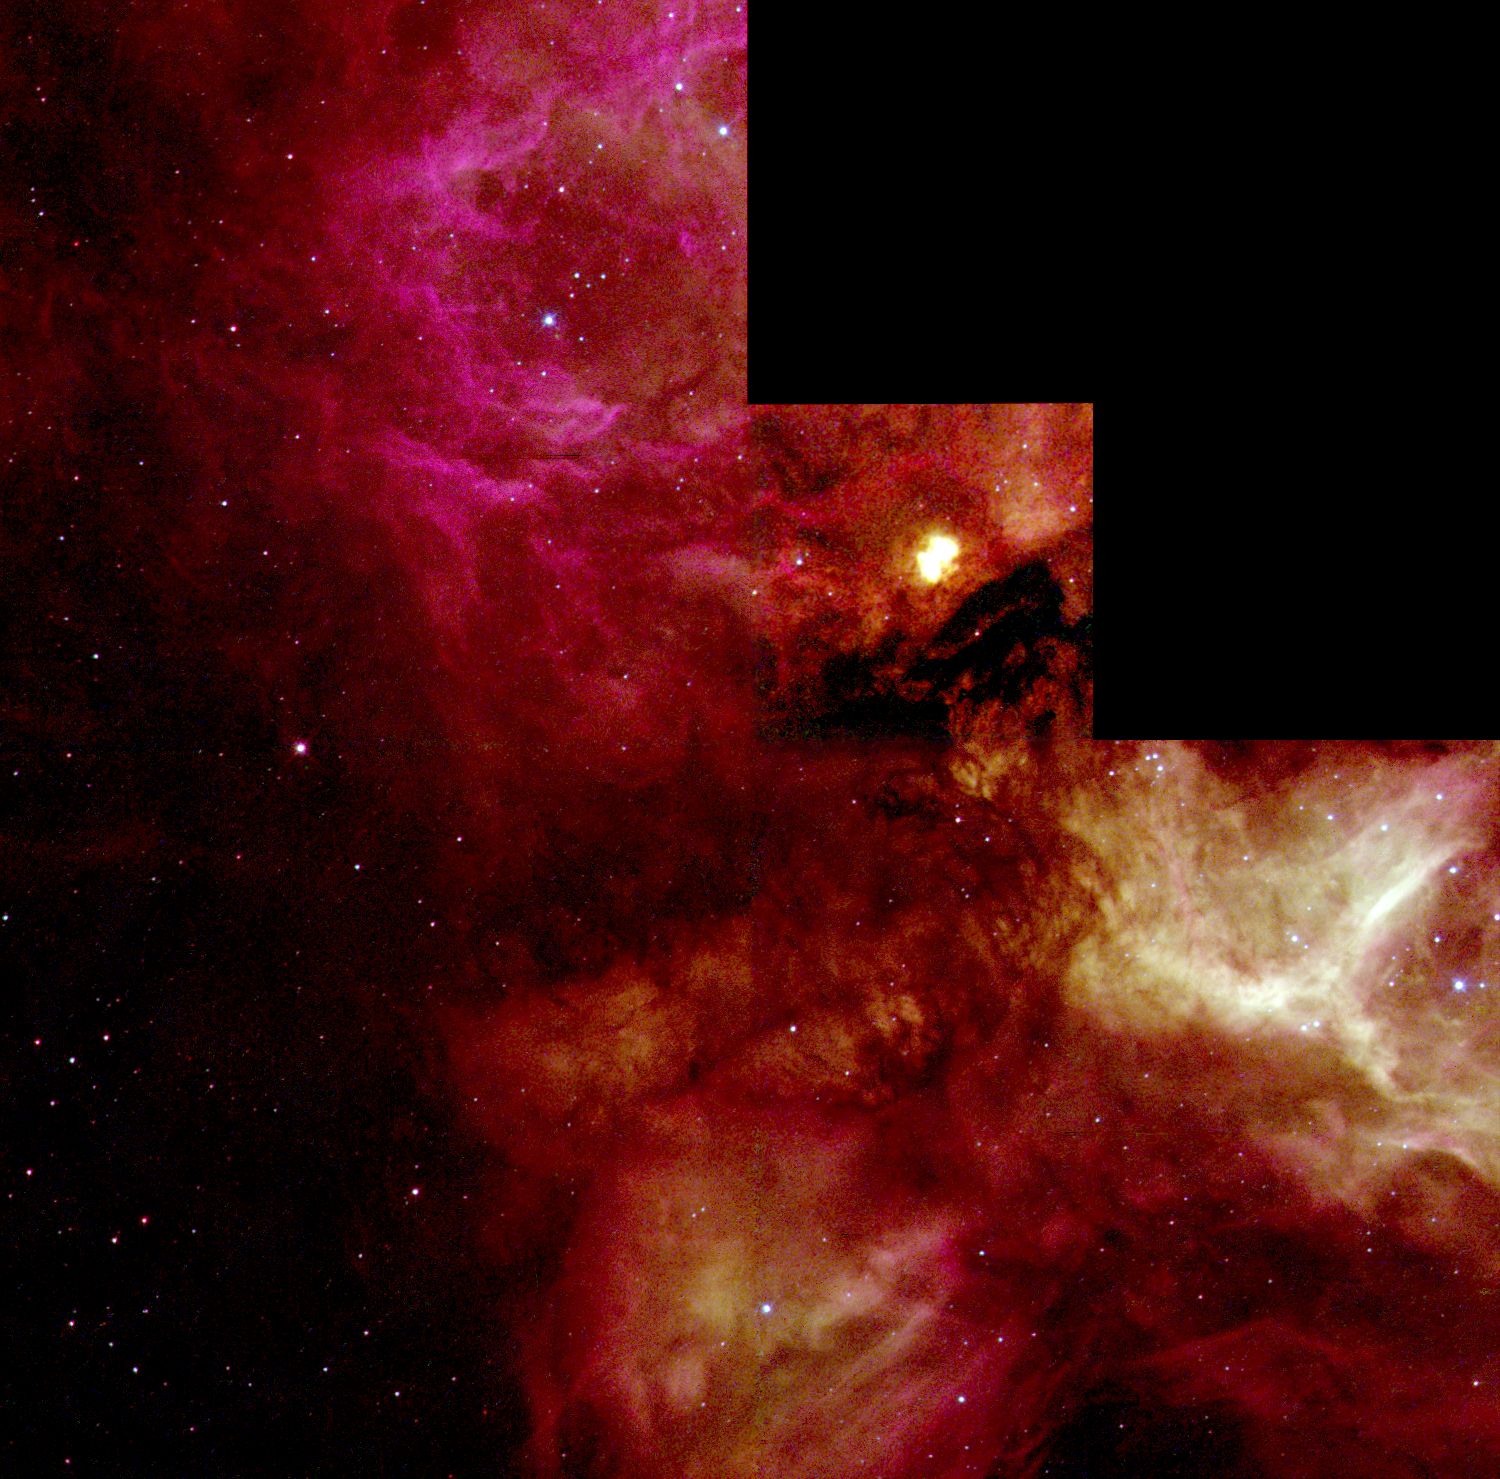

N159 in the Large Magellanic Cloud

A NASA/ESA Hubble Space Telescope view of a turbulent cauldron of starbirth, called N159, taking place 170,000 light-years away in our satellite galaxy, the Large Magellanic Cloud (LMC). Torrential stellar winds from hot newborn massive stars within the nebula sculpt ridges, arcs, and filaments in the vast cloud, which is over 150 light-years across.

Credit: M. Heydari-Malayeri (Paris Observatory) and NASA/ESA